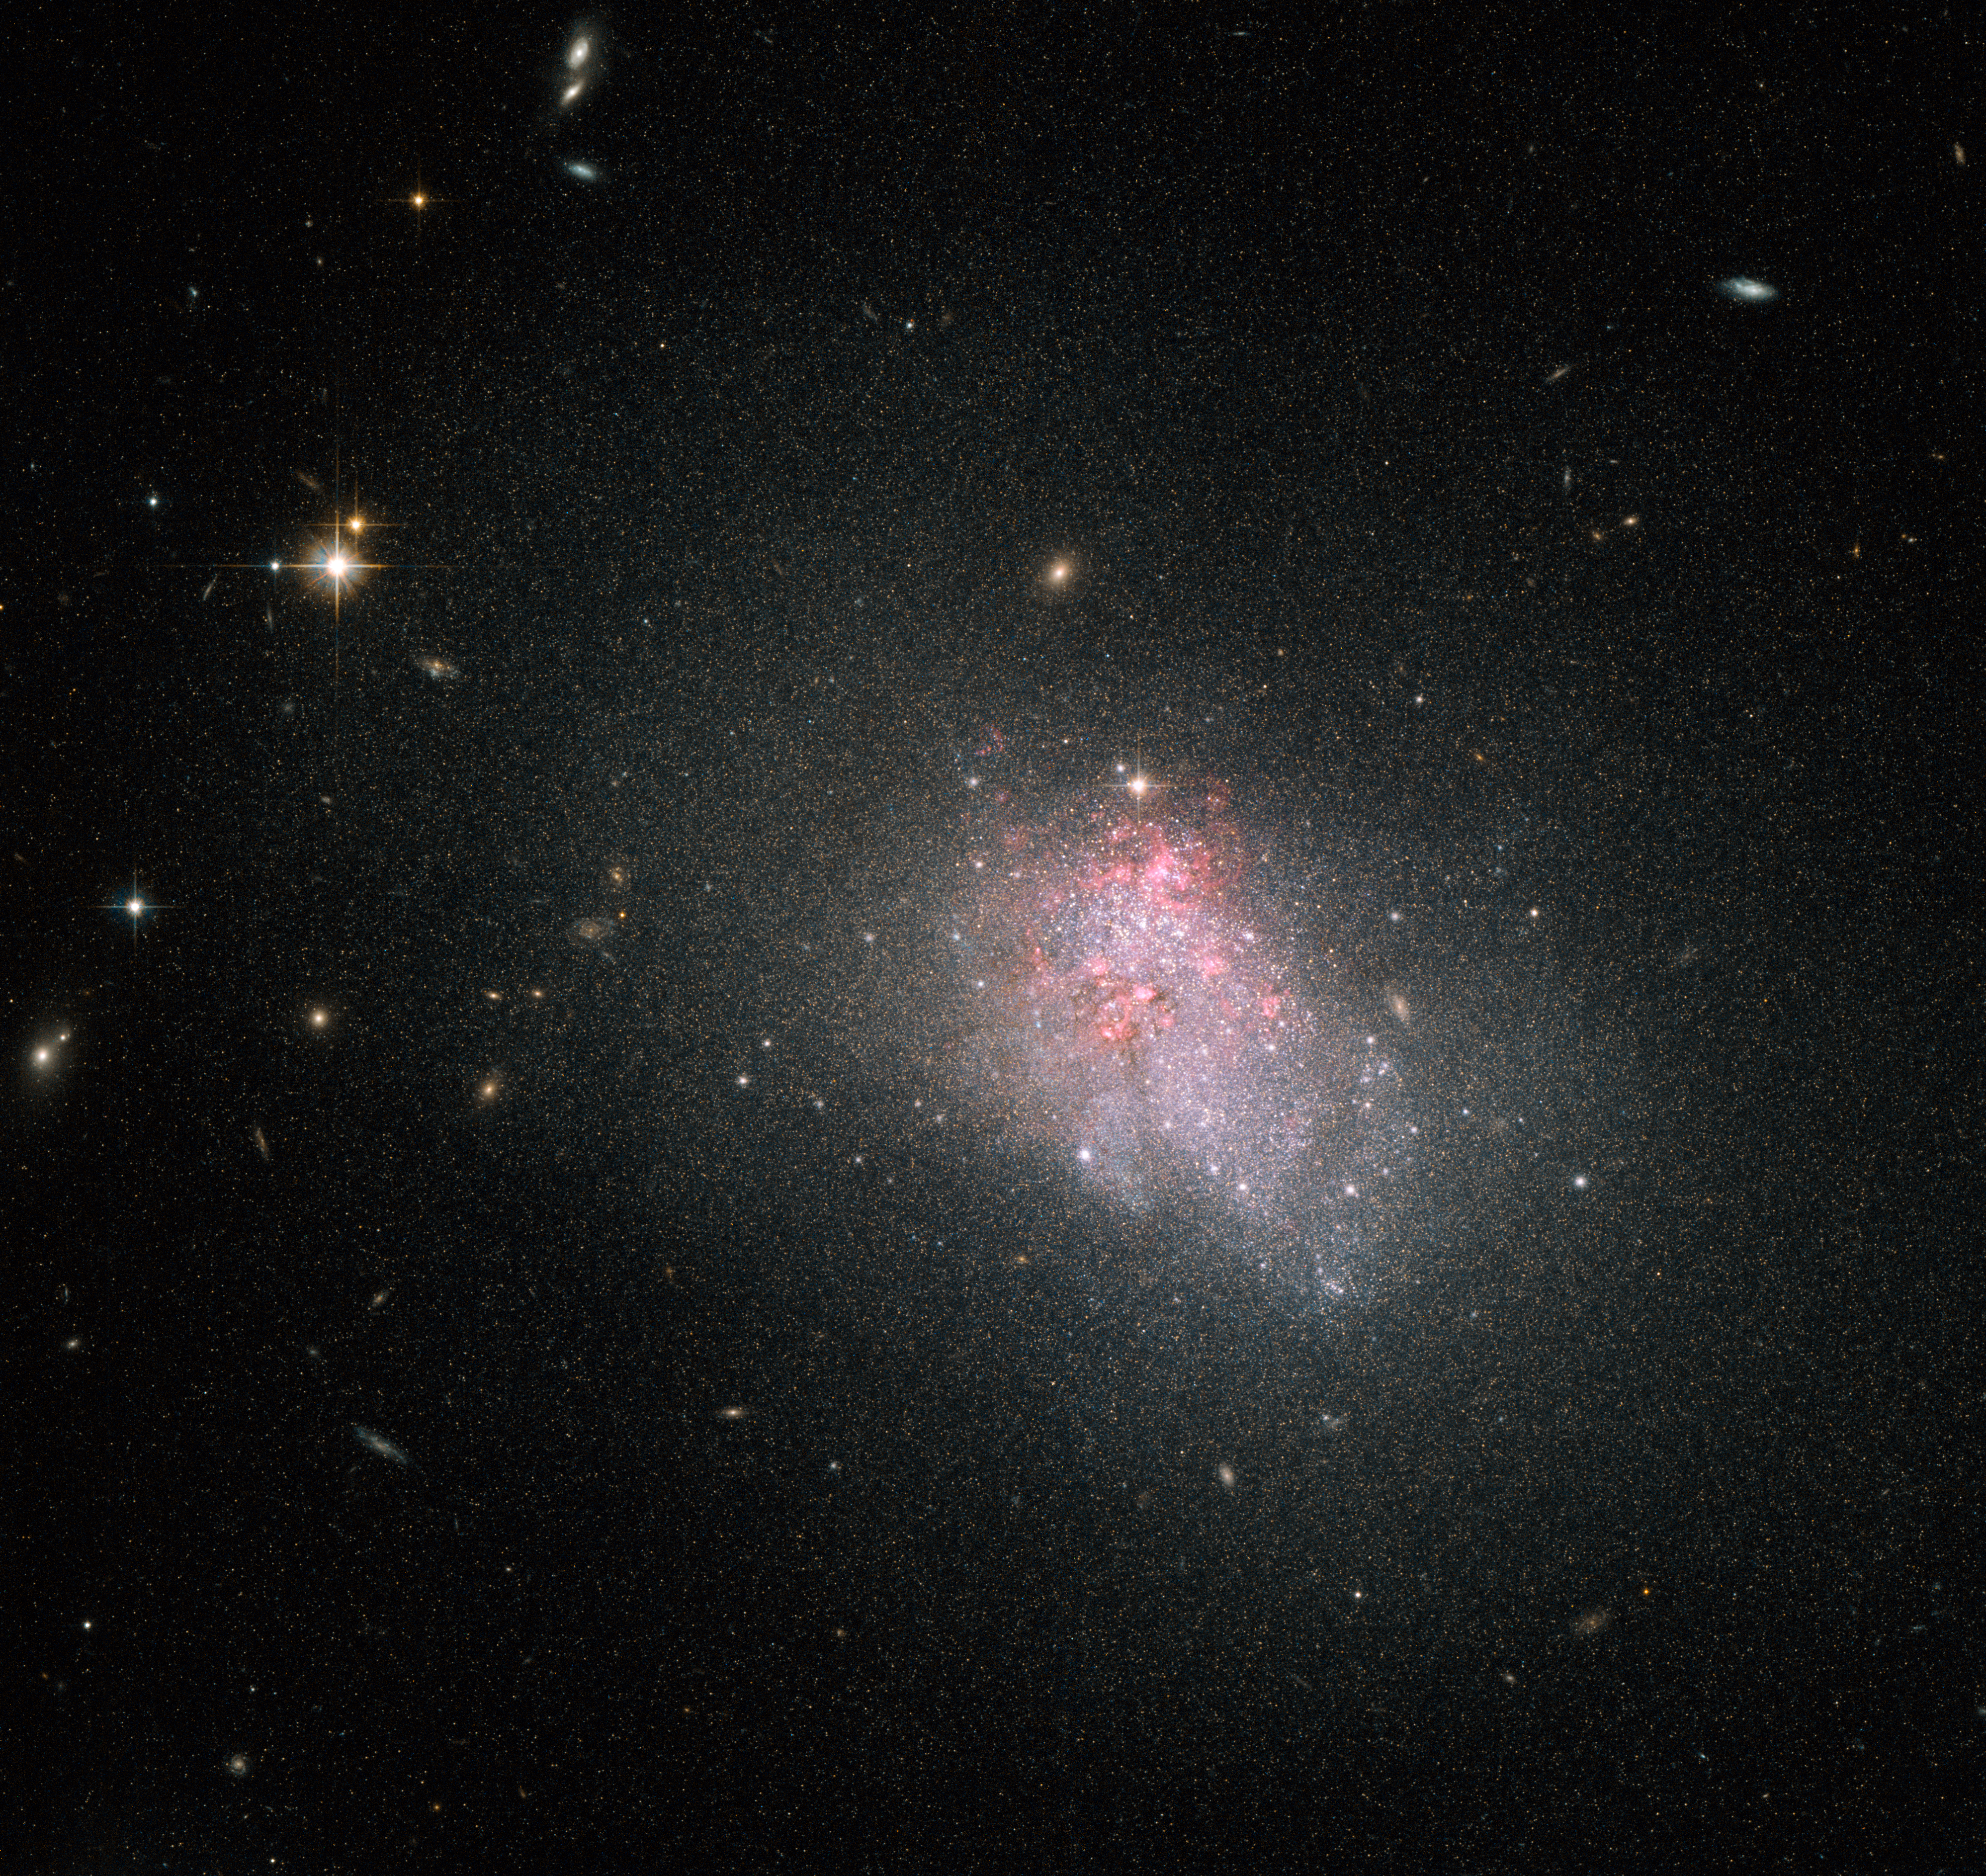

Violent star formation episodes in dwarf galaxies

The NASA/ESA Hubble Space Telescope has imaged the faint irregular galaxy NGC 3738, a starburst galaxy. The galaxy is in the midst of a violent episode of star formation, during which it is converting reservoirs of hydrogen gas harboured in the galaxy’s centre into stars. Hubble spots this gas glowing red around NGC 3738, one of the most distinctive signs of ongoing star formation.

Lying in the constellation of Ursa Major (The Great Bear), NGC 3738 is located about 12 million light-years from the Sun, and belongs to the Messier 81 group of galaxies. This galaxy — first observed by astronomer William Herschel back in 1789 — is a nearby example of a blue compact dwarf, the faintest type of starburst galaxy. Blue compact dwarfs are small compared to large spiral galaxies — NGC 3738 is around 10 000 light-years across, just one tenth of the size of the Milky Way.

This type of galaxy is blue in appearance by virtue of containing large clusters of hot, massive stars, which ionise the surrounding interstellar gas with their intense ultraviolet radiation. They are relatively faint and appear to be irregular in shape. Unlike spirals or elliptical galaxies, irregular galaxies do not have any distinctive features, such as a nuclear bulge or spiral arms. Rather, they are extremely chaotic in appearance. These galaxies are thought to resemble some of the earliest that formed in the Universe and may provide clues as to how stars appeared shortly after the Big Bang.

This image was created by combining visual and infrared images taken with the Wide Field Channel of the Advanced Camera for Surveys aboard the Hubble Space Telescope. The field of view of the Wide Field Channel is approximately 3.4 by 3.4 arcminutes wide.

Credit: ESA/Hubble & NASA